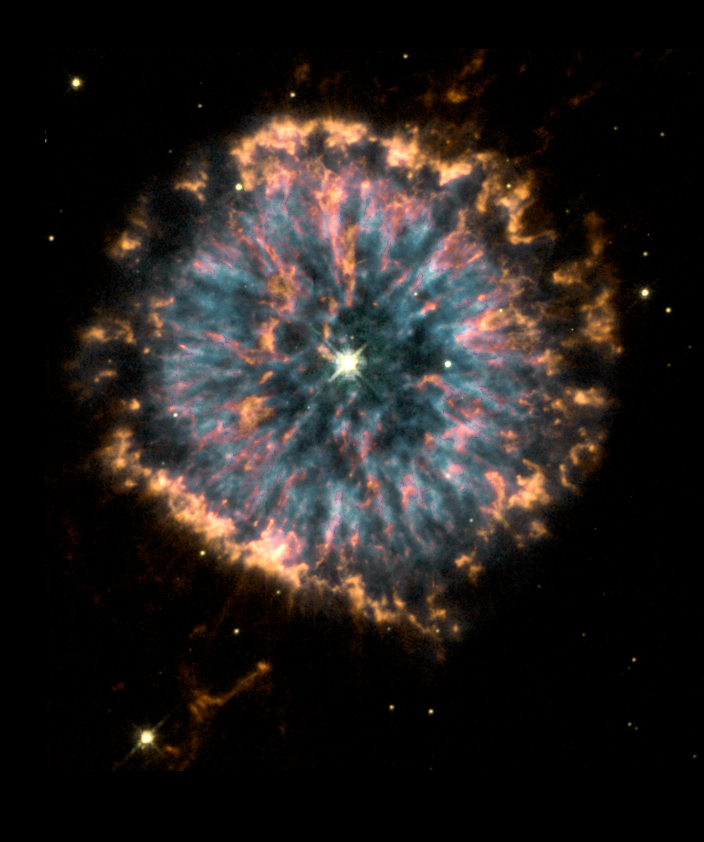

The glowing eye of NGC 6751

The Hubble telescope has spied a giant celestial 'eye', known as planetary nebula NGC 6751. The Hubble Heritage Project is releasing this picture to commemorate the Hubble telescope's tenth anniversary. Glowing in the constellation Aquila, the nebula is a cloud of gas ejected several thousand years ago from the hot star visible in its center.

Planetary nebulae have nothing to do with planets. They are shells of gas thrown off by Sun-like stars nearing the ends of their lives. The star's loss of its outer gaseous layers exposes the hot stellar core, whose strong ultraviolet radiation then causes the ejected gas to fluoresce as the planetary nebula.

Credit: NASA/ESA, The Hubble Heritage Team STScI/AURA